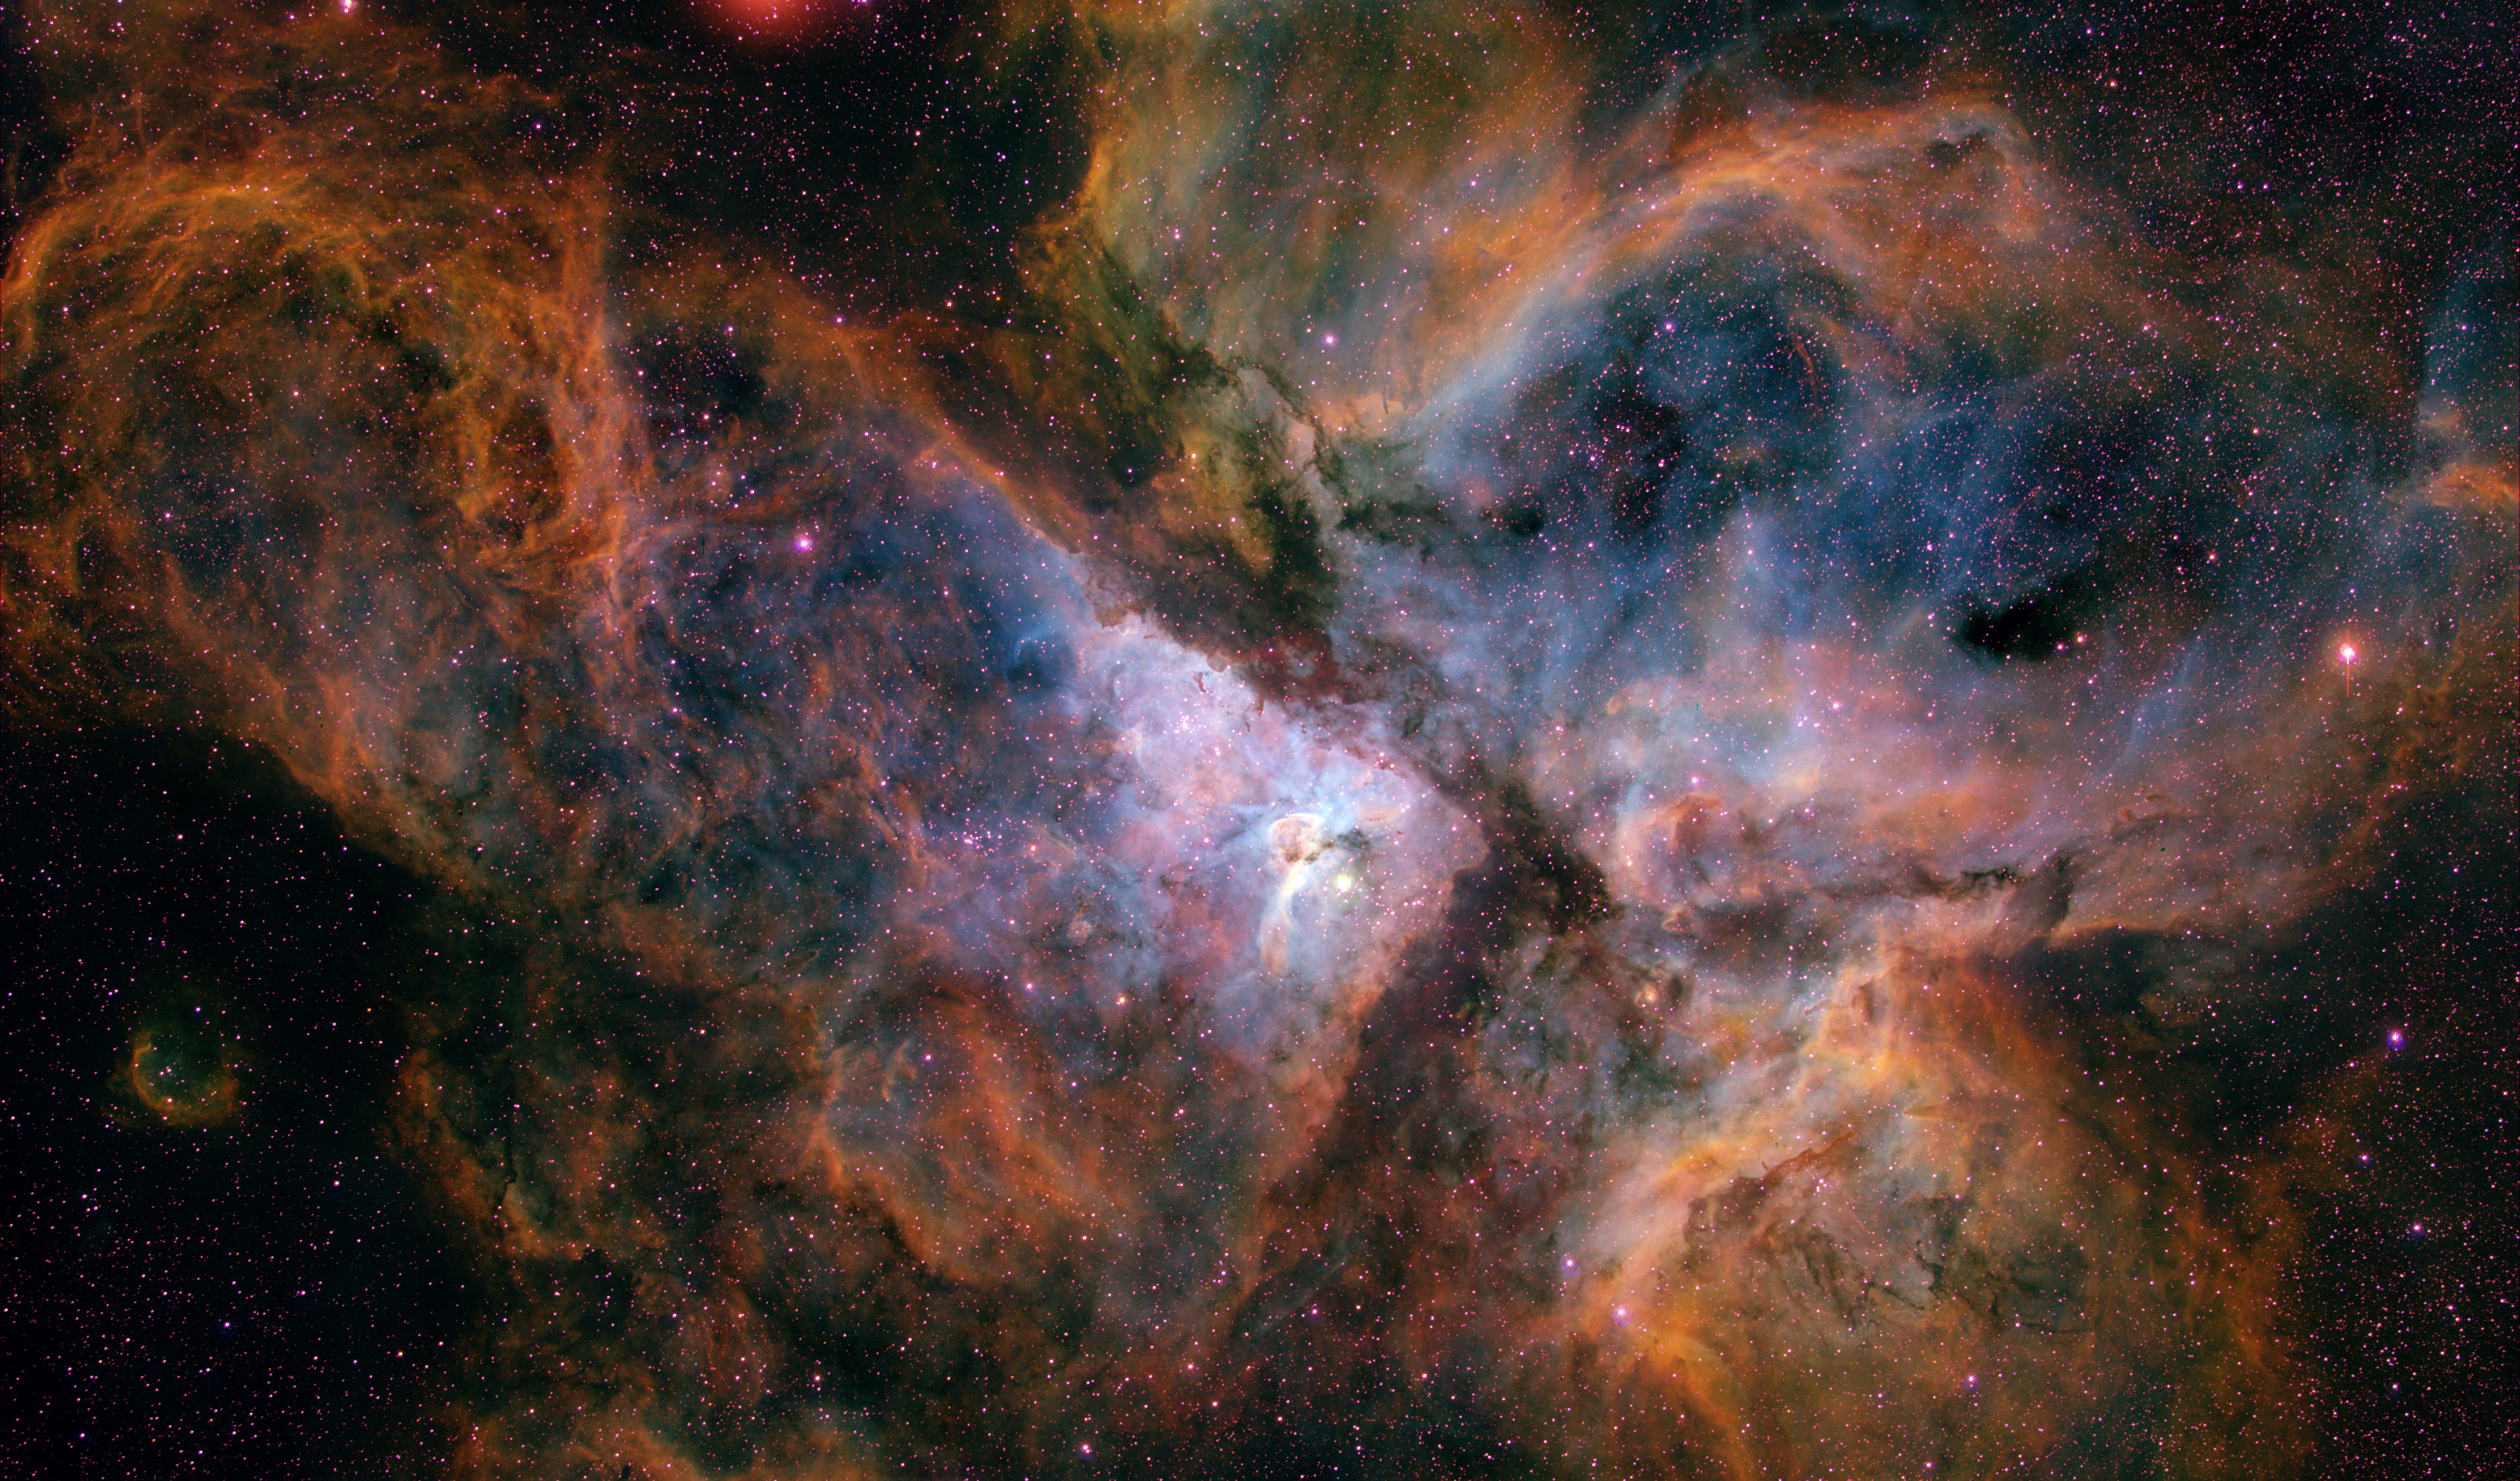

The Carina Nebula from the ground

This image shows a ground-based view of the giant star-forming region in the southern sky known as the Carina Nebula, combining the light from three different filters tracing emission from oxygen (blue), hydrogen (green), and sulphur (red). The colour is also representative of the temperature in the ionised gas: blue is relatively hot and red is cooler. The Carina Nebula is a good example of how very massive stars rip apart the molecular clouds that give birth to them. The bright star near the centre of the image is eta Carinae, one of the most massive and luminous stars known.

Credit: N. Smith and NOAO/AURA/NSF